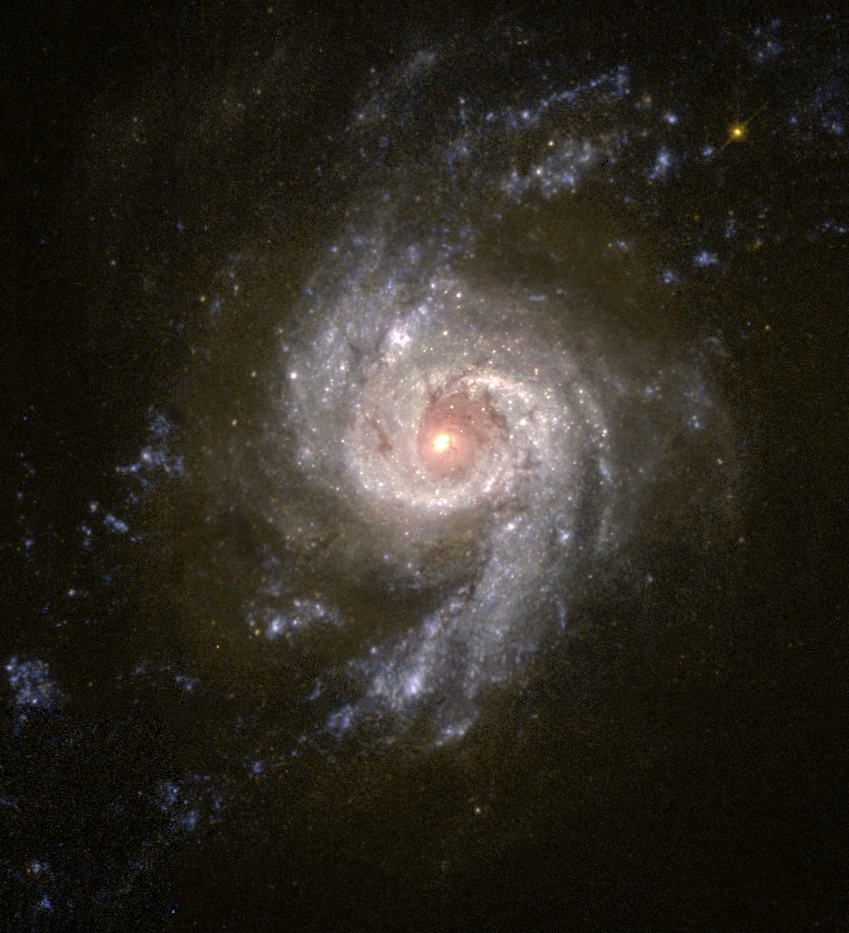

Baby Boom in Galaxy NGC 3310

Most galaxies form new stars at a fairly slow rate, but members of a rare class known as 'starburst' galaxies blaze with extremely active star formation. The galaxy NGC 3310 is one such starburst galaxy that is forming clusters of new stars at a prodigious rate. Scientists using the NASA/ESA Hubble Space Telescope are perfecting a technique to determine the history of starburst activity in NGC 3310 by studying the colours of its star clusters.

Credit: NASA/ESA and The Hubble Heritage Team (STScI/AURA)